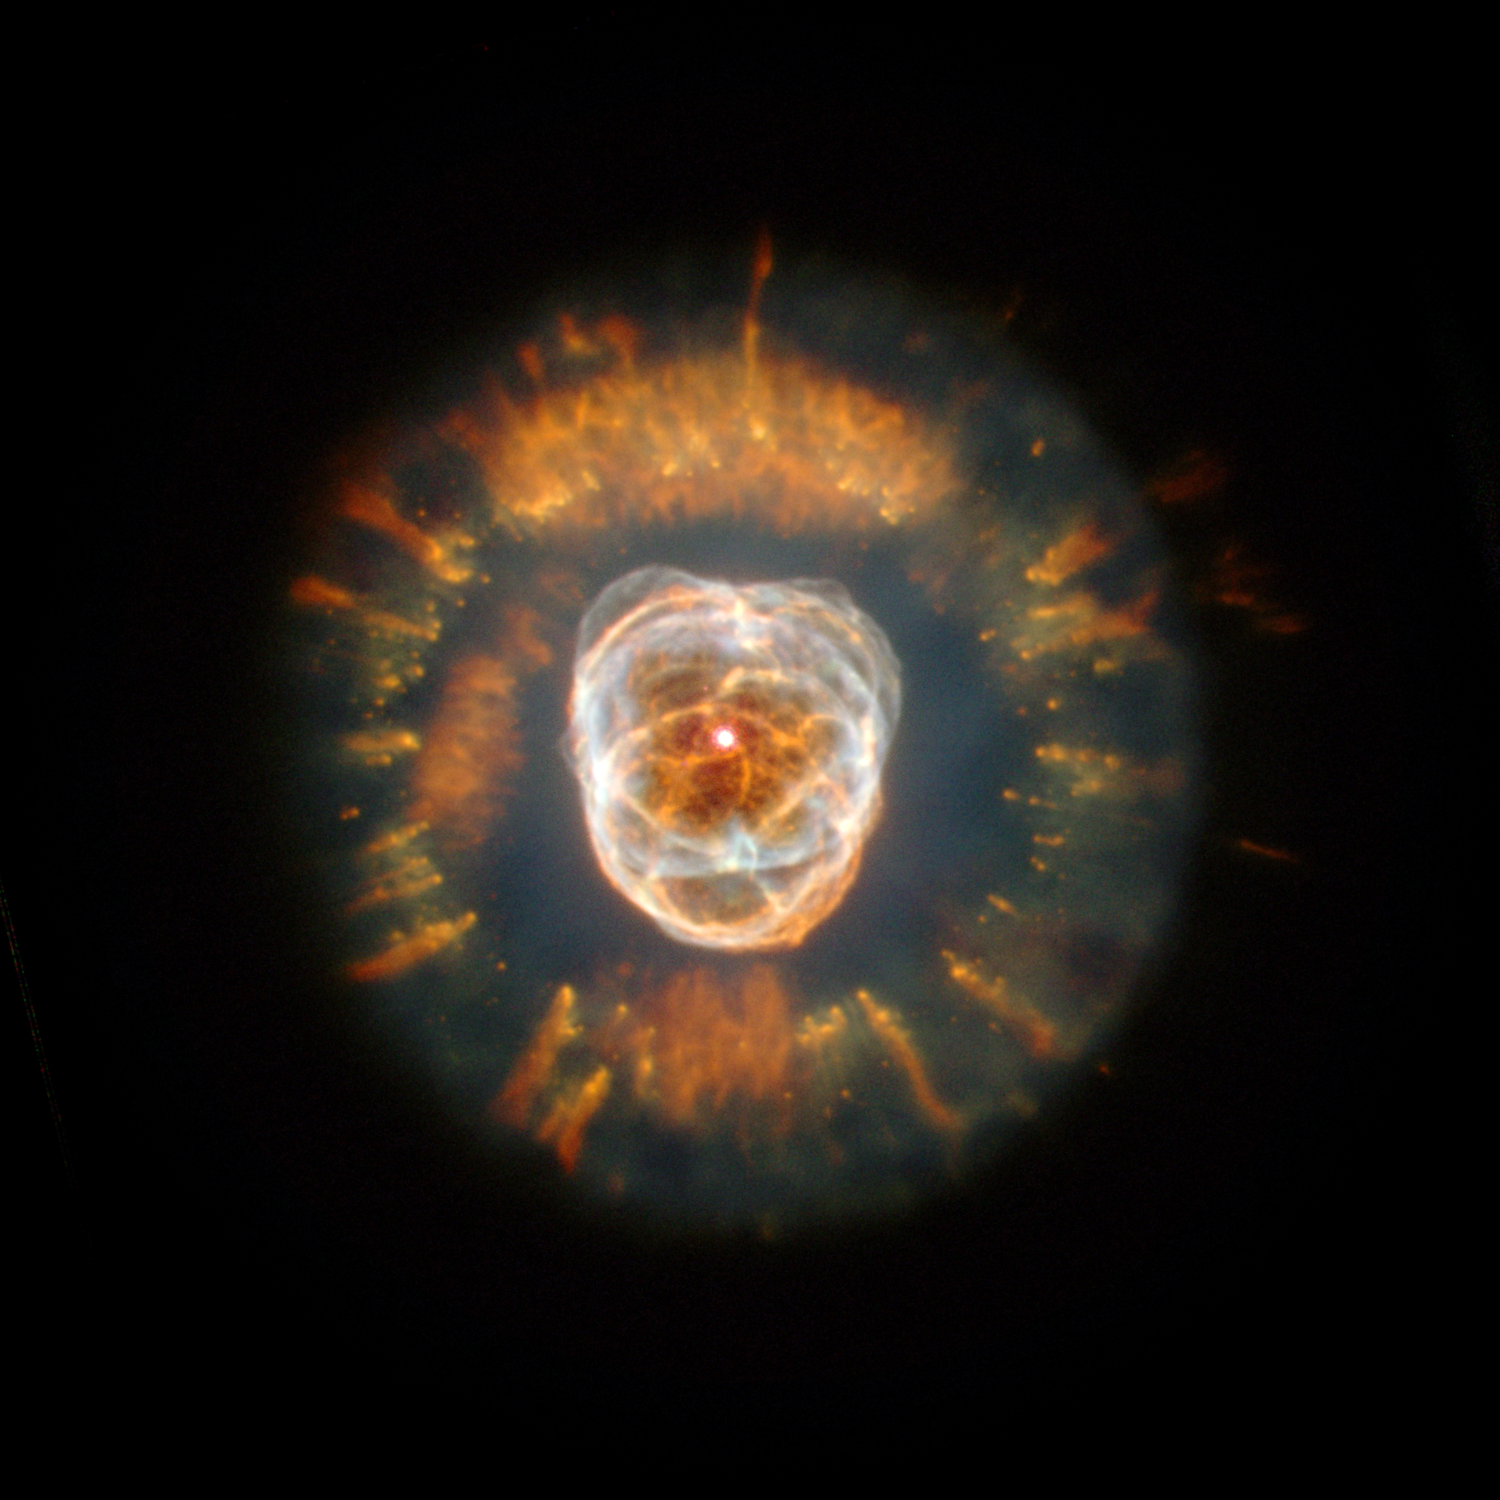

NGC 2392

In its first glimpse of the heavens following the successful December 1999 servicing mission, the NASA/ESA Hubble Space Telescope has captured a majestic view of a planetary nebula, the glowing remains of a dying, Sun-like star.

Credit: NASA, ESA, Andrew Fruchter (STScI), and the ERO team (STScI + ST-ECF)